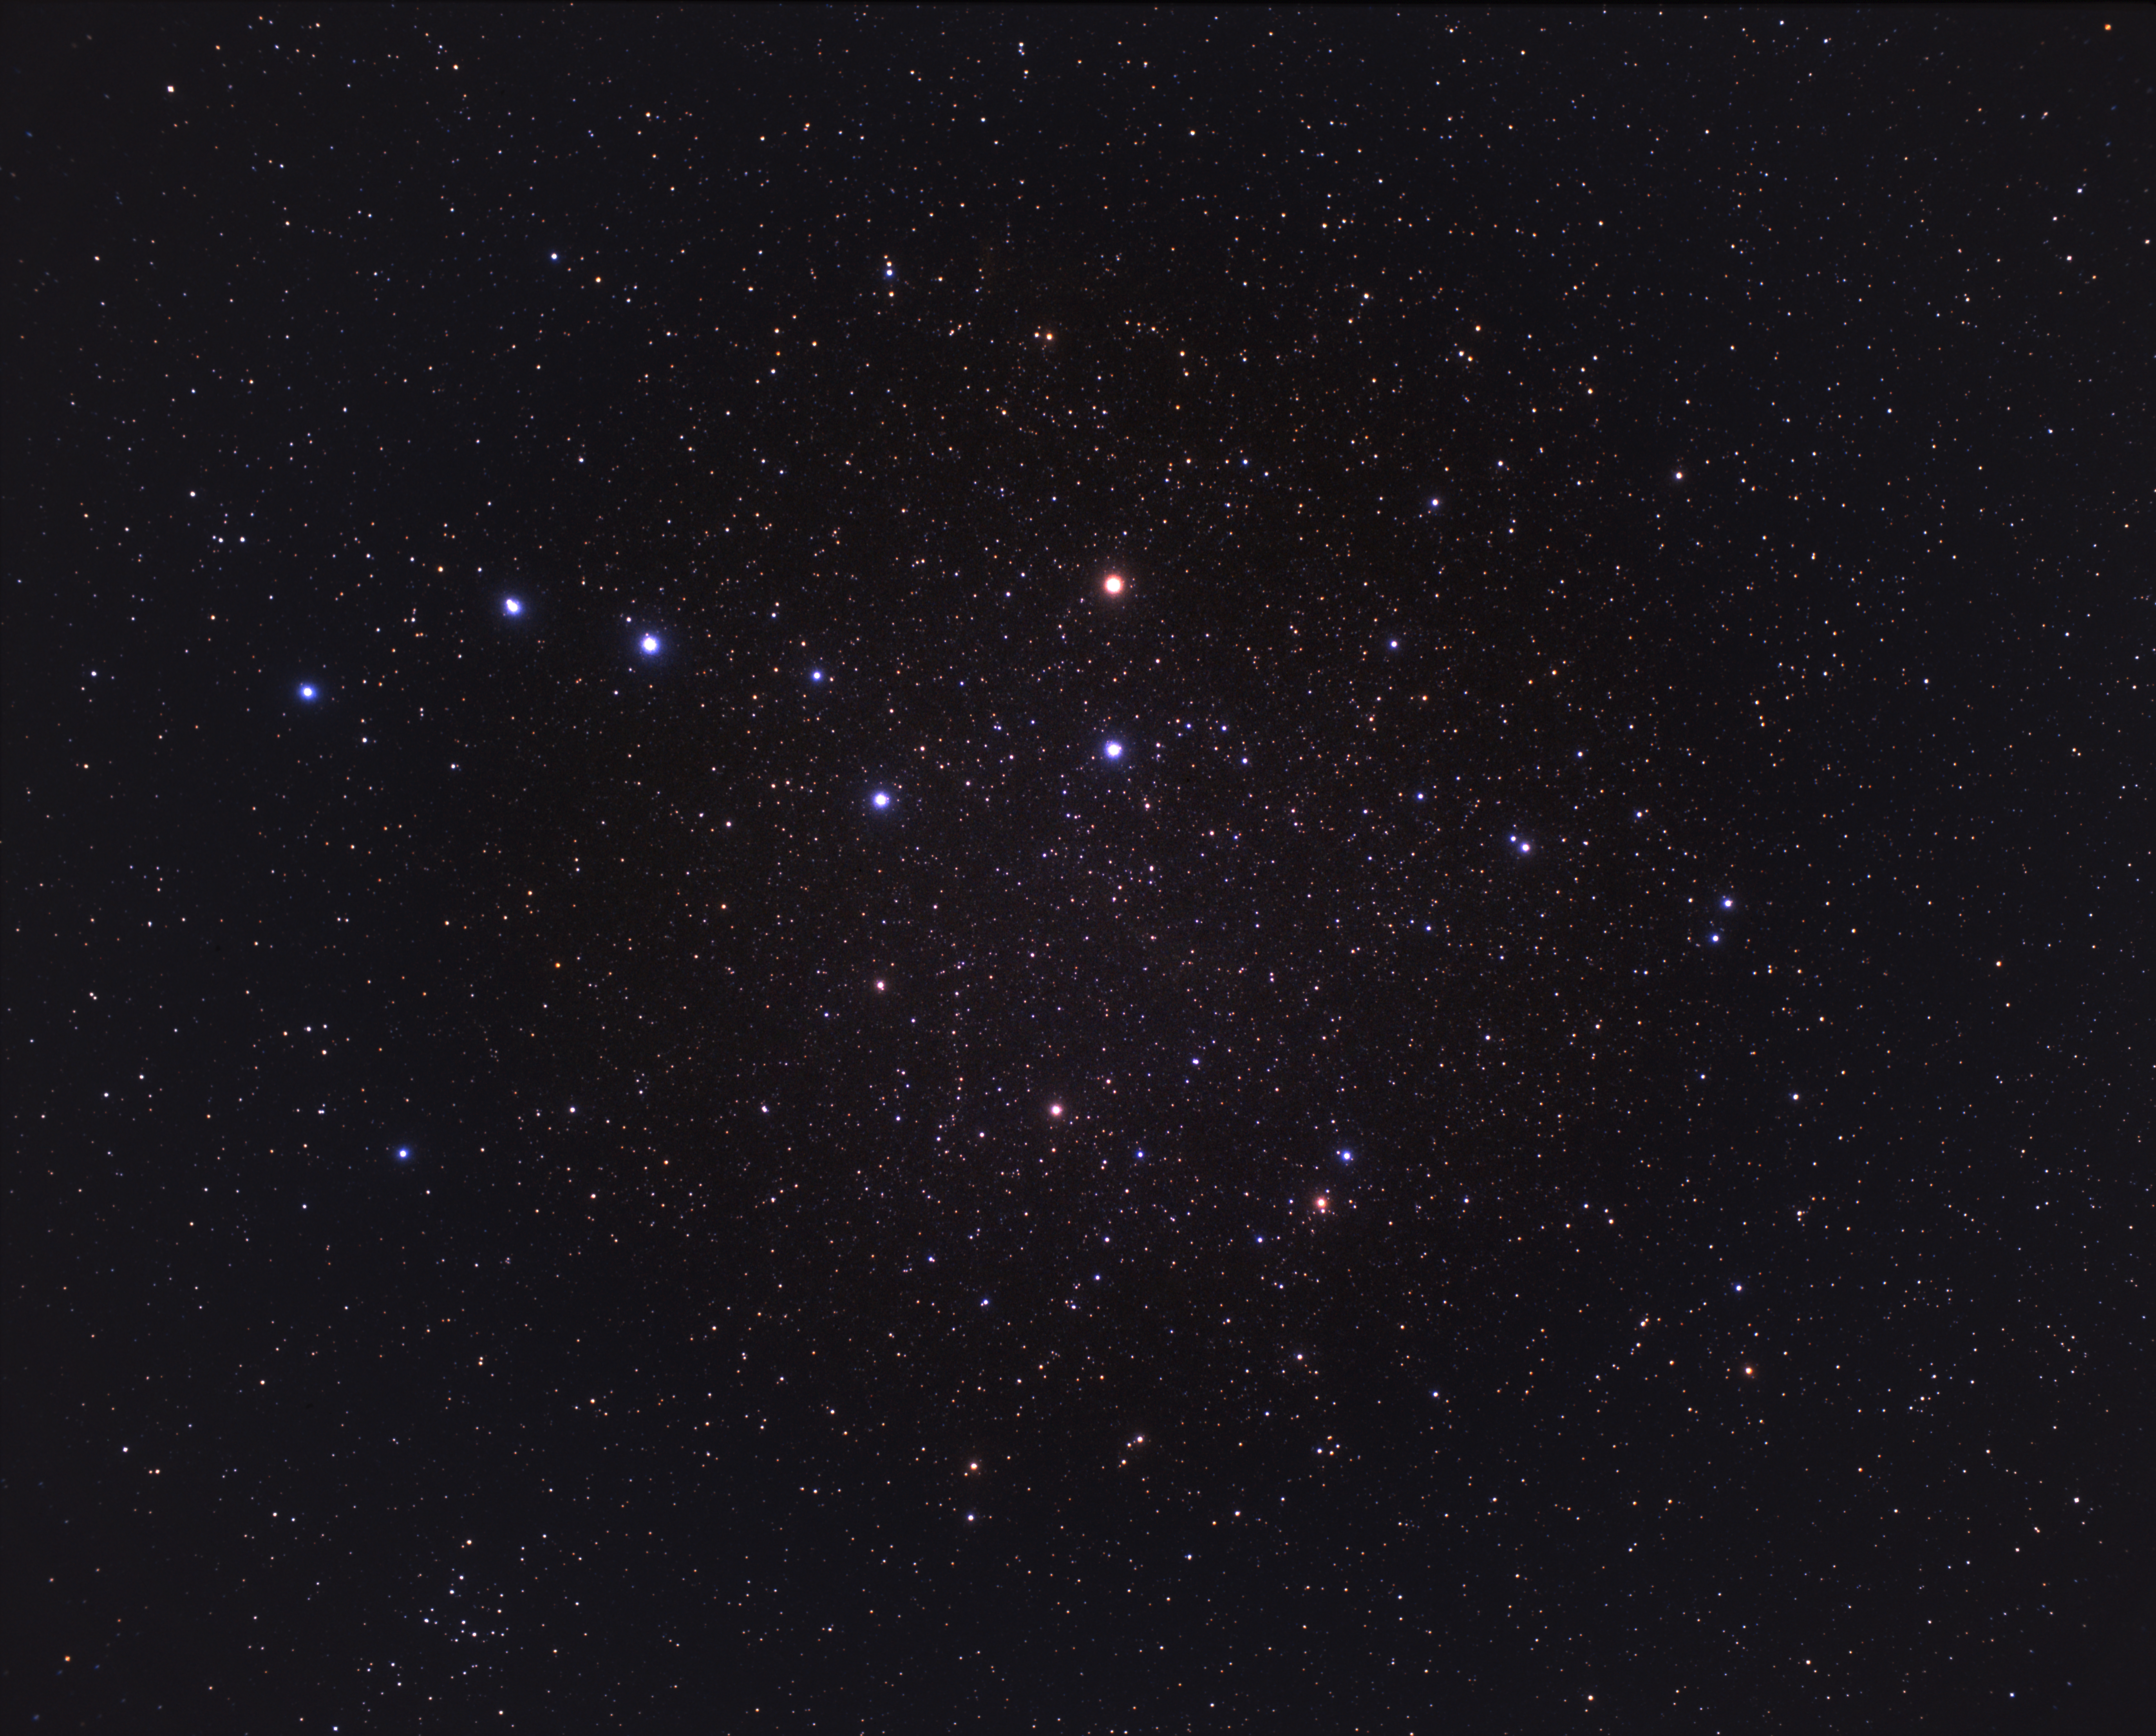

I Zwicky 18 (ground-based image)

A wide-field view of the constellation of Ursa Major. The galaxy studied by Hubble astronomers, I Zwicky 18, is located to the right of the asterism seen in this image known as "The Plough" or the "Big Dipper".

Credit: A. Fujii